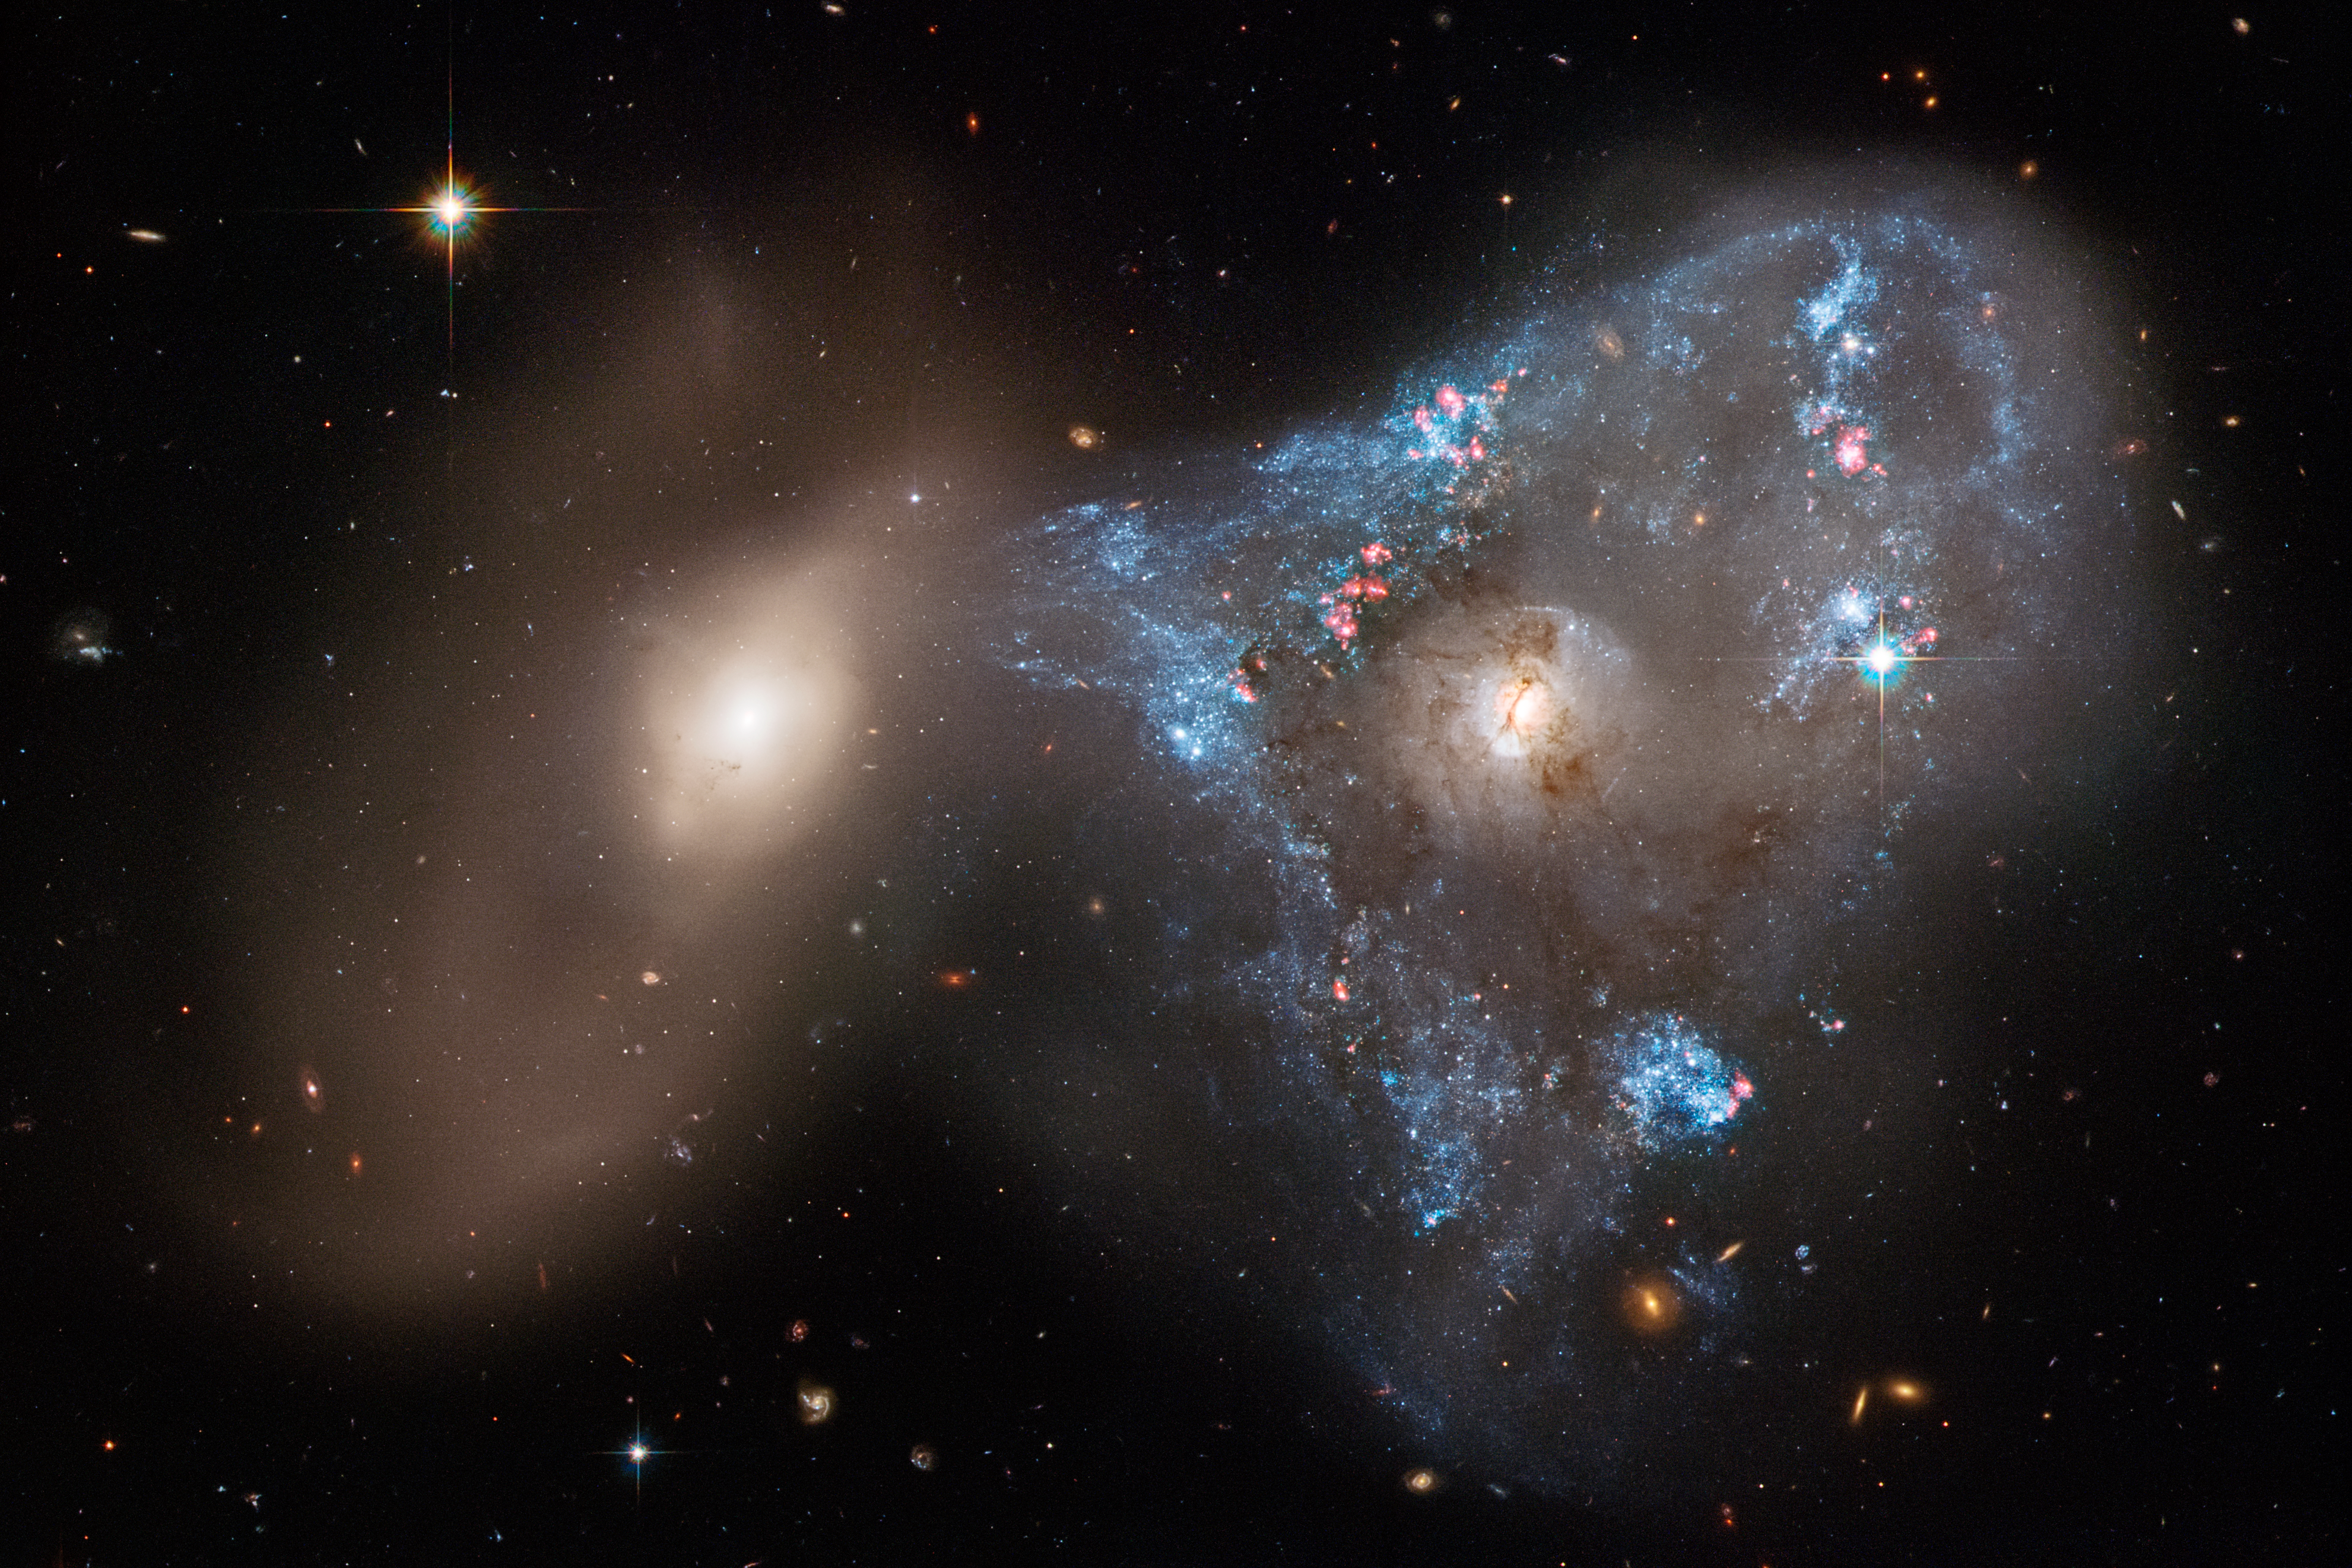

Hubble’s Observation of Arp 143

A spectacular head-on collision between two galaxies has been captured by the NASA/ESA Hubble Space Telescope, which has the unusual triangular-shaped star-birthing frenzy.

The interacting galaxy duo is collectively called Arp 143. The pair contains the distorted, star-forming spiral galaxy NGC 2445, at right, along with its less flashy companion, NGC 2444, at left. This frenzied action takes place against the tapestry of distant galaxies. Some of them can be seen through the interacting pair.

Credit: NASA, ESA, STScI, and J. Dalcanton (Center for Computational Astrophysics/Flatiron Inst., UWashington)